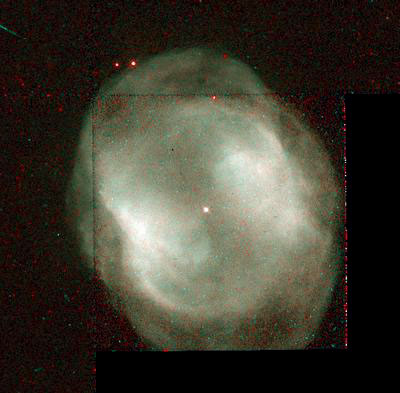

NGC 3195

This image is a part of the Hubble Gallery of Planetary Nebulae.

Credit: Howard Bond (STScI) and NASA/ESA